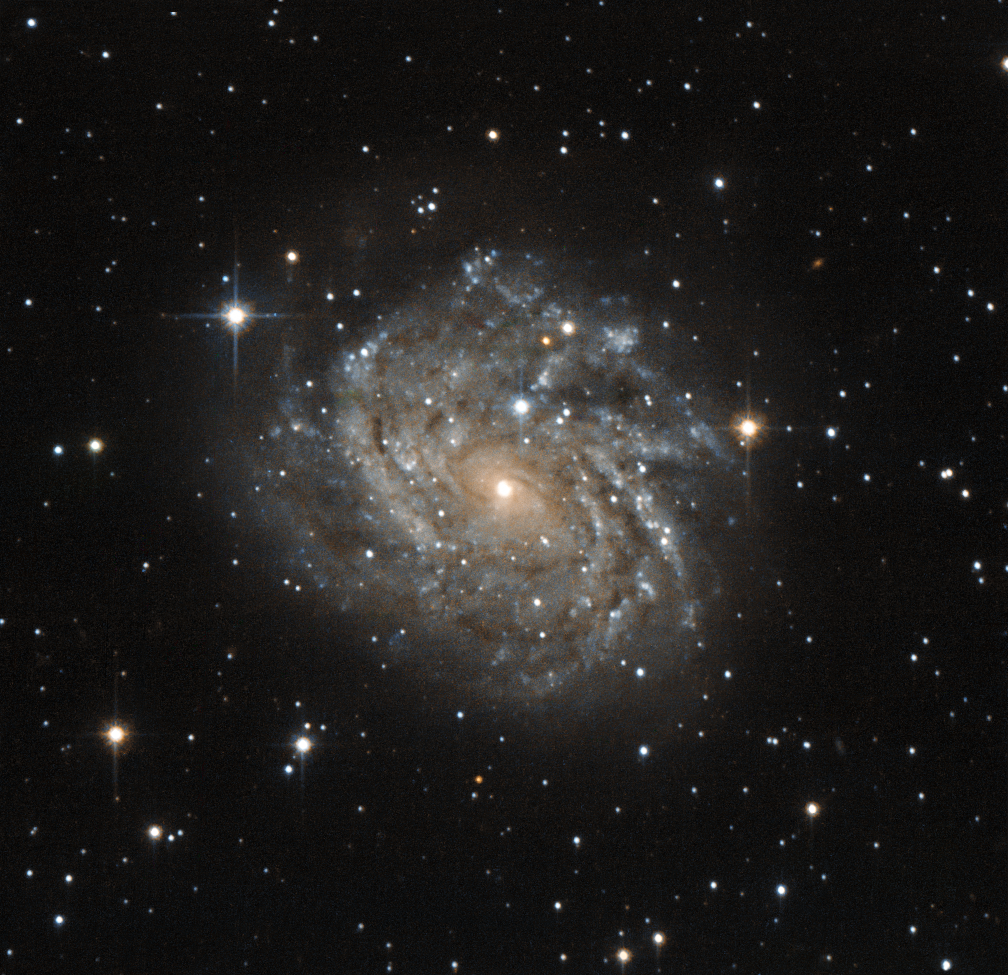

Galaxy with a view

This little-known galaxy, officially named J04542829-6625280, but most often referred to as LEDA 89996, is a classic example of a spiral galaxy. The galaxy is much like our own galaxy, the Milky Way. The disc-shaped galaxy is seen face on, revealing the winding structure of the spiral arms. Dark patches in these spiral arms are in fact dust and gas — the raw materials for new stars. The many young stars that form in these regions make the spiral arms appear bright and bluish.

The galaxy sits in a vibrant area of the night sky within the constellation of Dorado (The Swordfish), and appears very close to the Large Magellanic Cloud — one of the satellite galaxies of the Milky Way.

The observations were carried out with the high resolution channel of Hubble’s Advanced Camera for Surveys. This instrument has delivered some of the sharpest views of the Universe so far achieved by mankind. This image covers only a tiny patch of sky — about the size of a one cent euro coin held 100 metres away!

A version of this image was entered into the Hubble’s Hidden Treasures image processing competition by flickr user c.claude.

Credit: ESA/Hubble & NASA
Acknowledgement: Flickr user c.claude